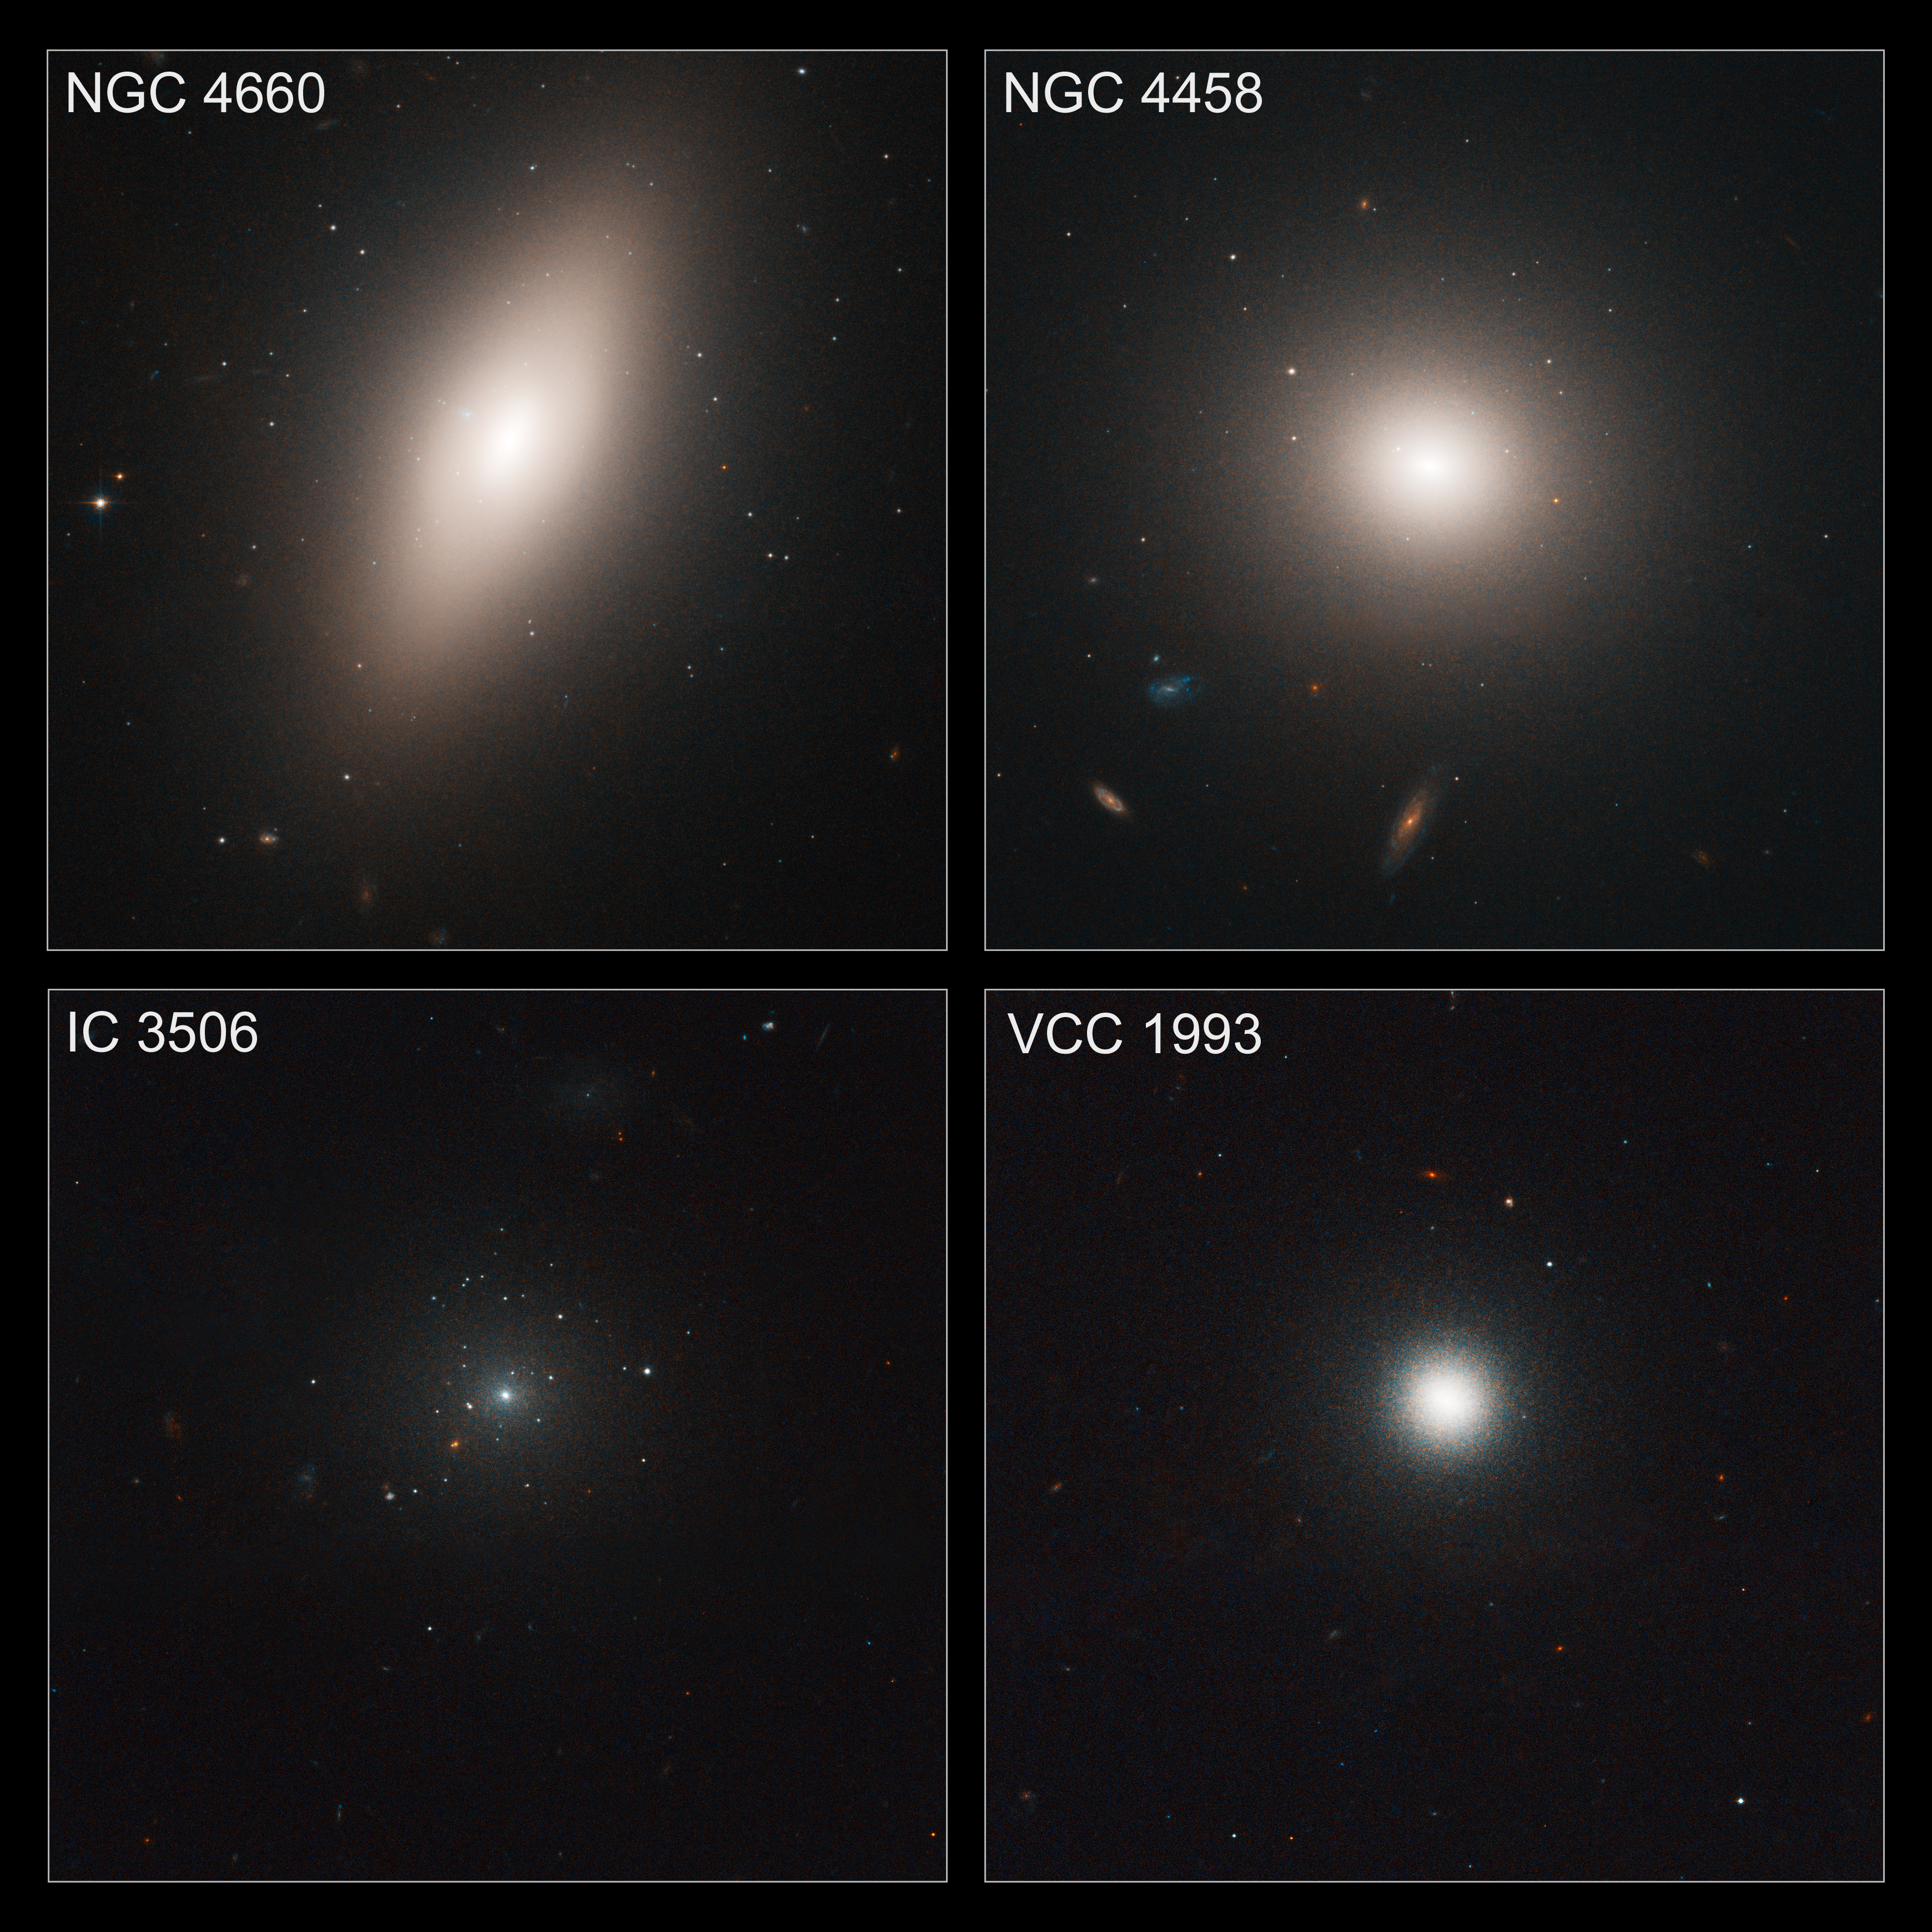

Searching for star clusters

These images taken by the NASA/ESA Hubble Space Telescope show four members of the Virgo cluster of galaxies, the nearest large galaxy cluster to Earth.

They are part of a survey of globular star clusters in 100 of Virgo's galaxies. Globular clusters, dense bunches of hundreds of thousands of stars, have some of the oldest surviving stars in the universe. Most of the star clusters in the Virgo survey are older than 5 billion years.

The Hubble study found evidence that these hardy pioneers are more likely to form in dense areas, where star birth occurs at a rapid rate, instead of uniformly from galaxy to galaxy.

Hubble's "eye" is so sharp that it was able to pick out the fuzzy globular clusters, which, at that distance, look like individual stars bunched up around the galaxies, instead of groupings of stars.

Comprised of over 2,000 galaxies, the Virgo cluster is located about 54 million light-years away.

Astronomers made these composite images from the advanced camera's full field-of-view observations. They also used modeling data to fill in a narrow gap between the camera's detectors.

The images were taken from December 2002 to December 2003.

Credit: ESA, NASA and E. Peng (Peking University, Beijing)